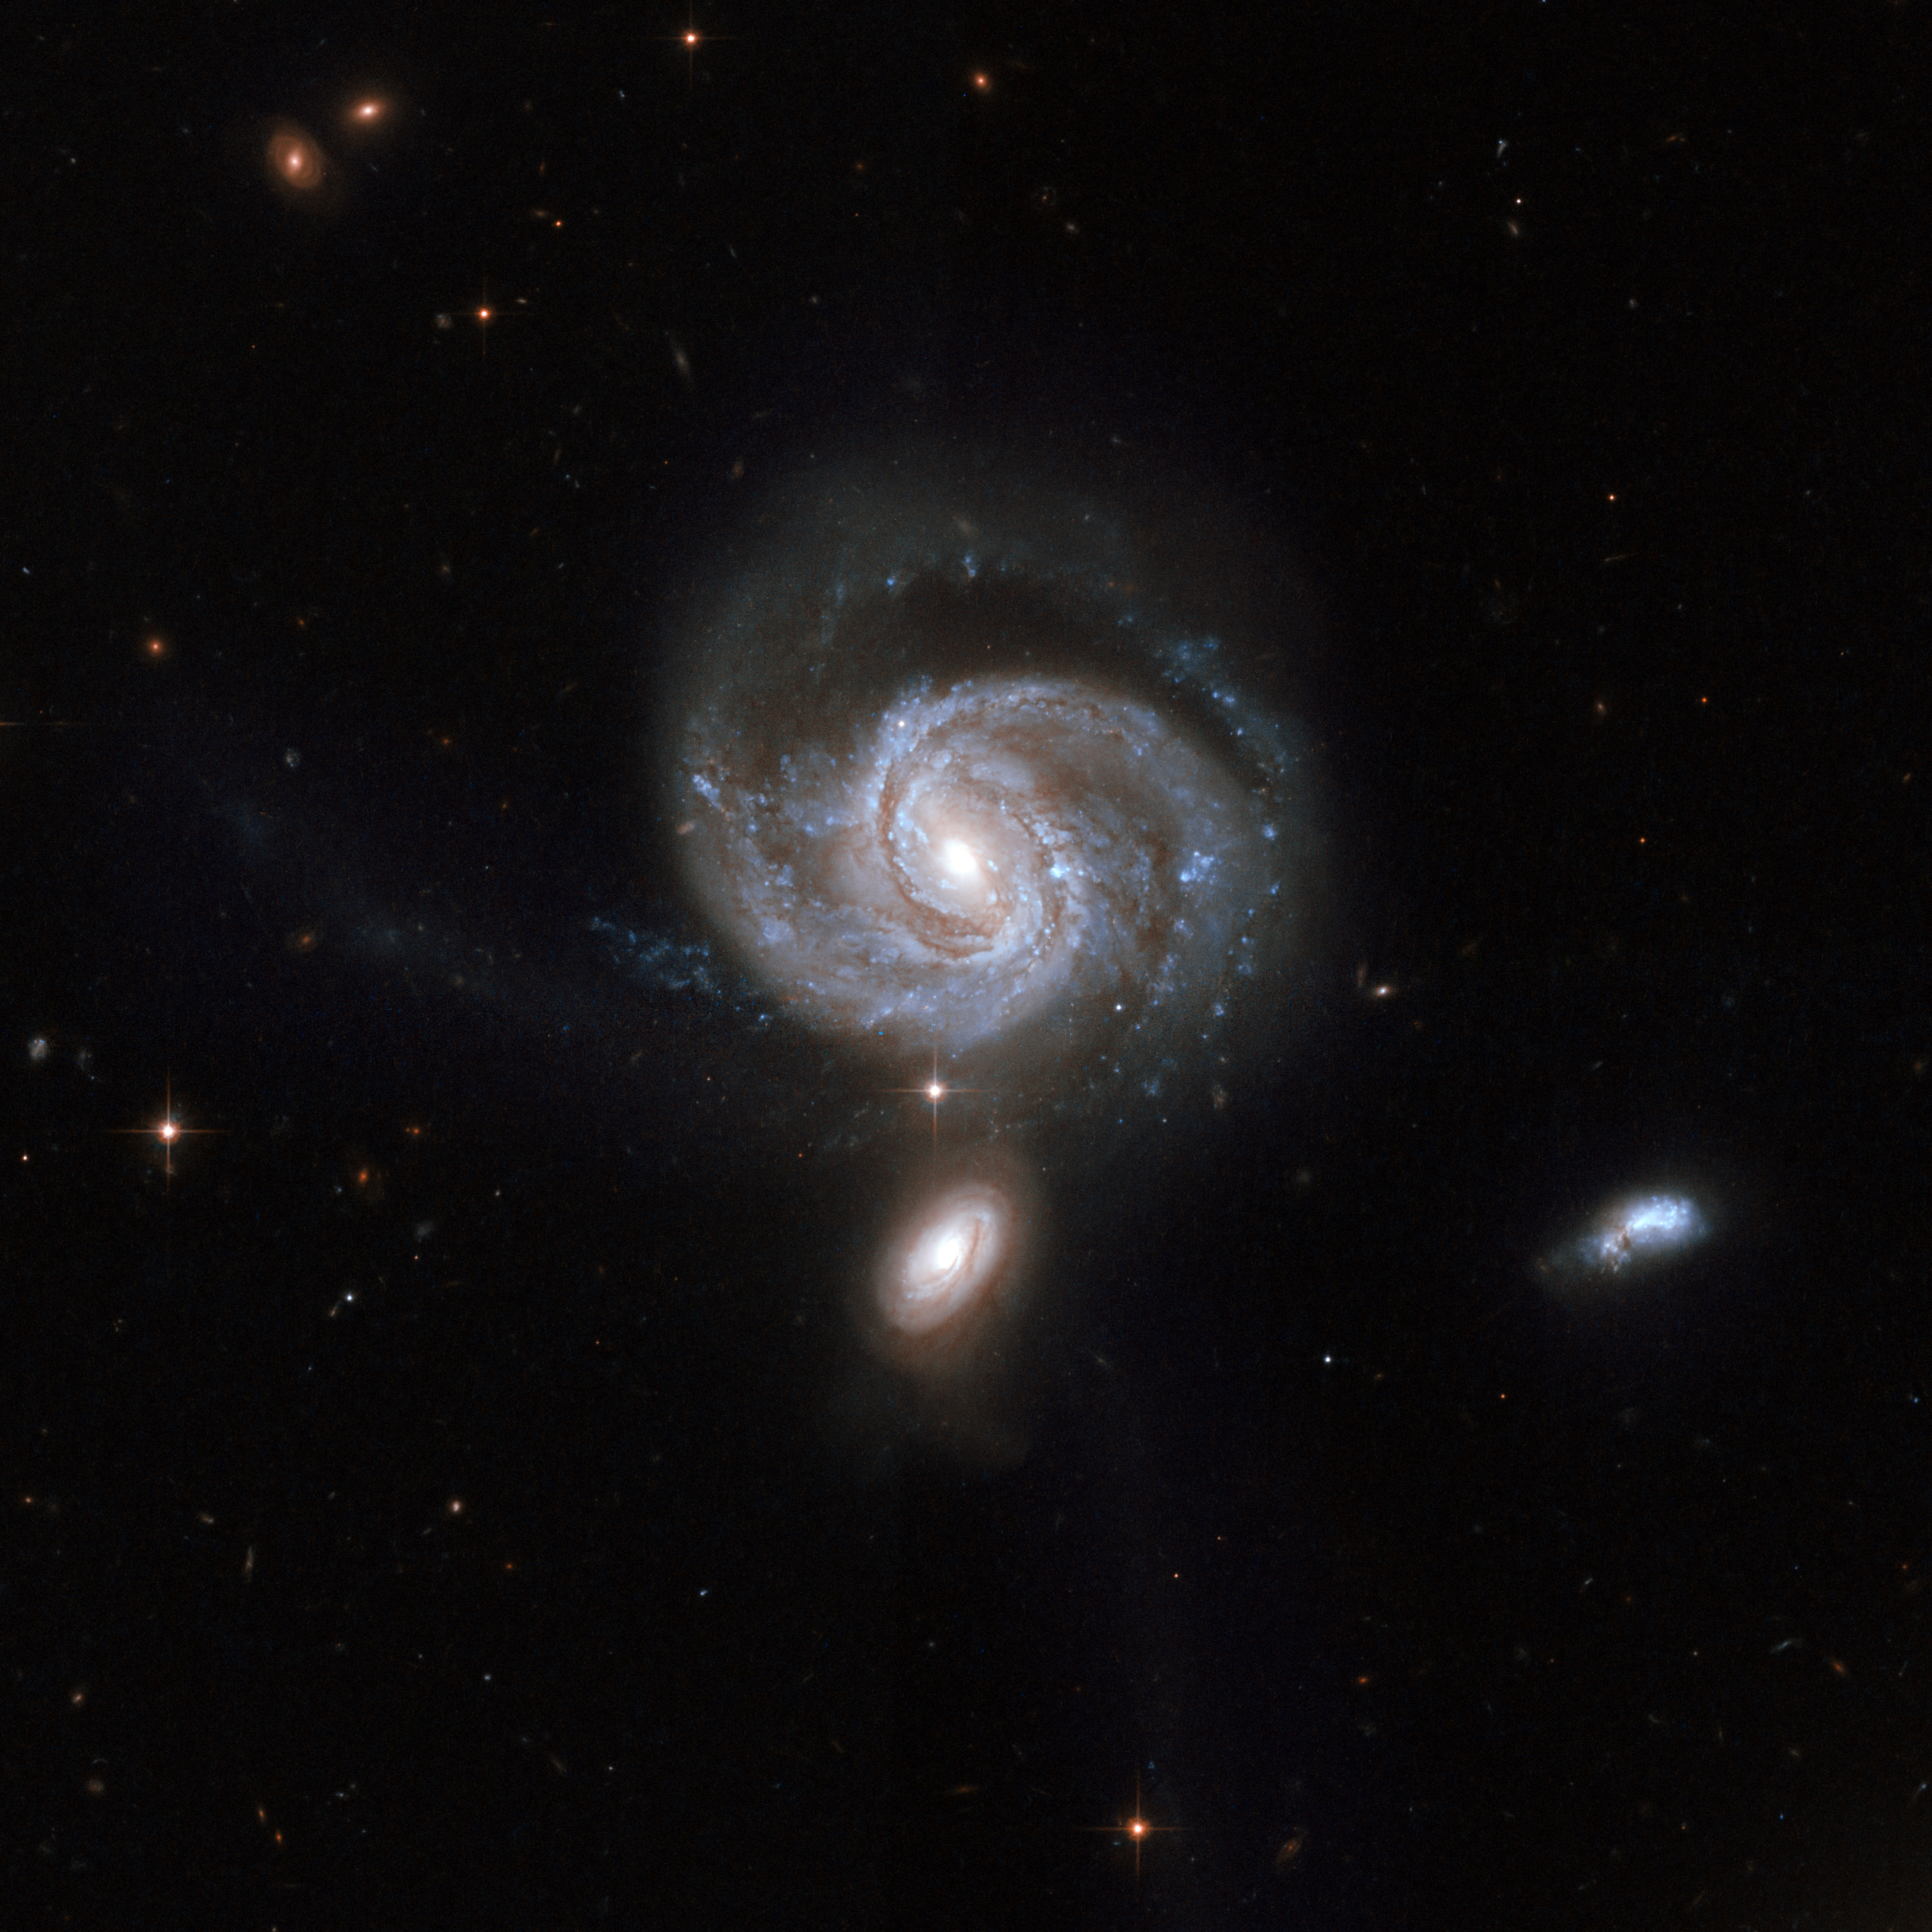

NGC 7674

NGC 7674 (seen just above the centre), also known as Markarian 533, is the brightest and largest member of the so-called Hickson 96 compact group of galaxies, consisting of four galaxies. This stunning Hubble image shows a spiral galaxy nearly face-on. The central bar-shaped structure is made up of stars. The shape of NGC 7674, including the long narrow streamers seen to the left of and below the galaxy can be accounted for by tidal interactions with its companions.

NGC 7674 has a powerful active nucleus of the kind known as a type 2 Seyfert that is perhaps fed by gas drawn into the centre through the interactions with the companions.

NGC 7674 falls into the family of luminous infrared galaxies and is featured in Arp's Atlas of Peculiar Galaxies as number 182. It is located in the constellation of Pegasus, the Winged Horse, about 400 million light-years away from Earth.

This image is part of a large collection of 59 images of merging galaxies taken by the Hubble Space Telescope and released on the occasion of its 18th anniversary on 24th April 2008.

Credit: NASA, ESA, the Hubble Heritage Team (STScI/AURA)-ESA/Hubble Collaboration and A. Evans (University of Virginia, Charlottesville/NRAO/Stony Brook University)